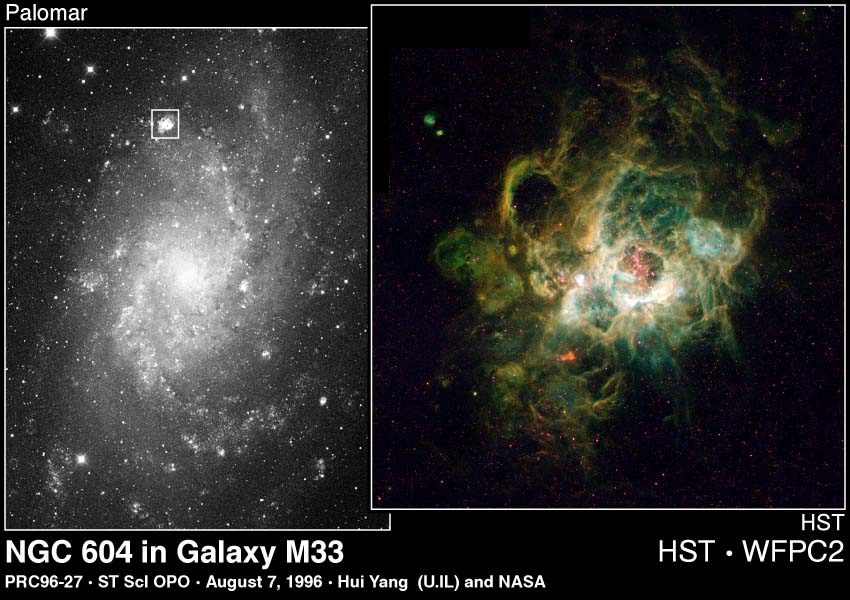

NGC 604 in Galaxy M 33

At the heart of NGC 604 are over 200 hot stars, much more massive than our Sun (15 to 60 solar masses).

They heat the gaseous walls of the nebula making the gas fluoresce. Their light also highlights the nebula's three-dimensional shape, like a lantern in a cavern.

Credit: Hui Yang (University of Illinois) and NASA/ESA